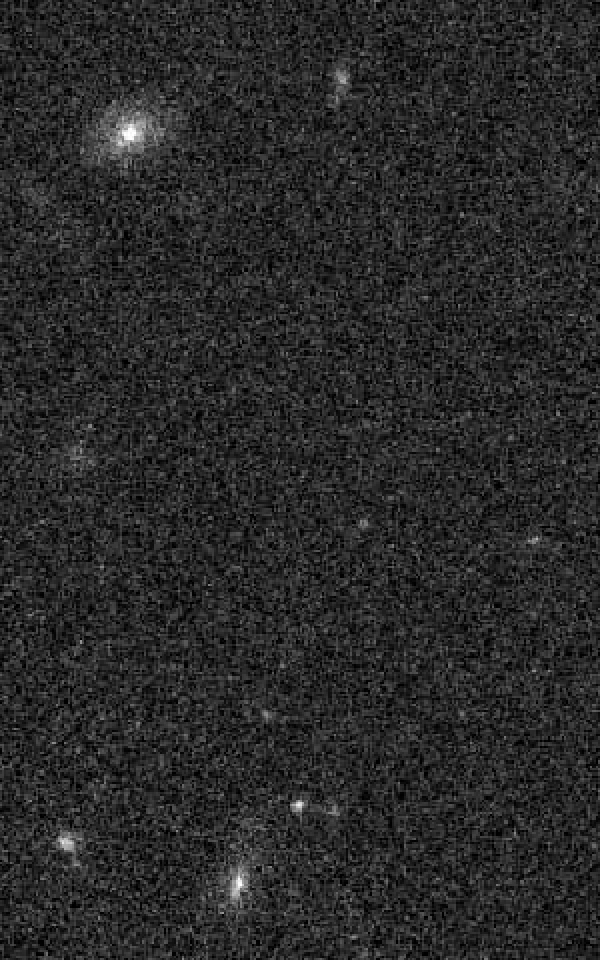

Field of optical transient source not visible - November 2005 - January 2006

In 2006 the ESO/NASA Hubble Space Telescope observed an object, which brightend over a period of 100 days and then faded over a similar period. The spectrum of the light from the object did not fit any known supernova types. Even worse, astronomers were not able to trace back the few spectral lines in the light of the object to any known elements which made it impossible to determine the distance of the object. In addition neither a star of the Milky Way nor another galaxy was found at the location of the object.

The picture presented here was taken before the object started to brighten up. Otherwise the object would we visible in the very center of the image.

Astronomers came up with several explanations for the nature of SC 06F6: It was suggested that SCP 06F6 might be a supernova at an extreme distance. It would also be possible that Hubble observed the collision between an asteroid and a white star, or the collision of a white star and a black hole. Other ideas included the core collapse of a carbon star, a pair-instability supernova or even a complete new kind of supernova. However, the true nature of SCP 06F6 so far stays a mystery.

Credit: NASA, ESA and K. Barbary (University of California, Berkeley)